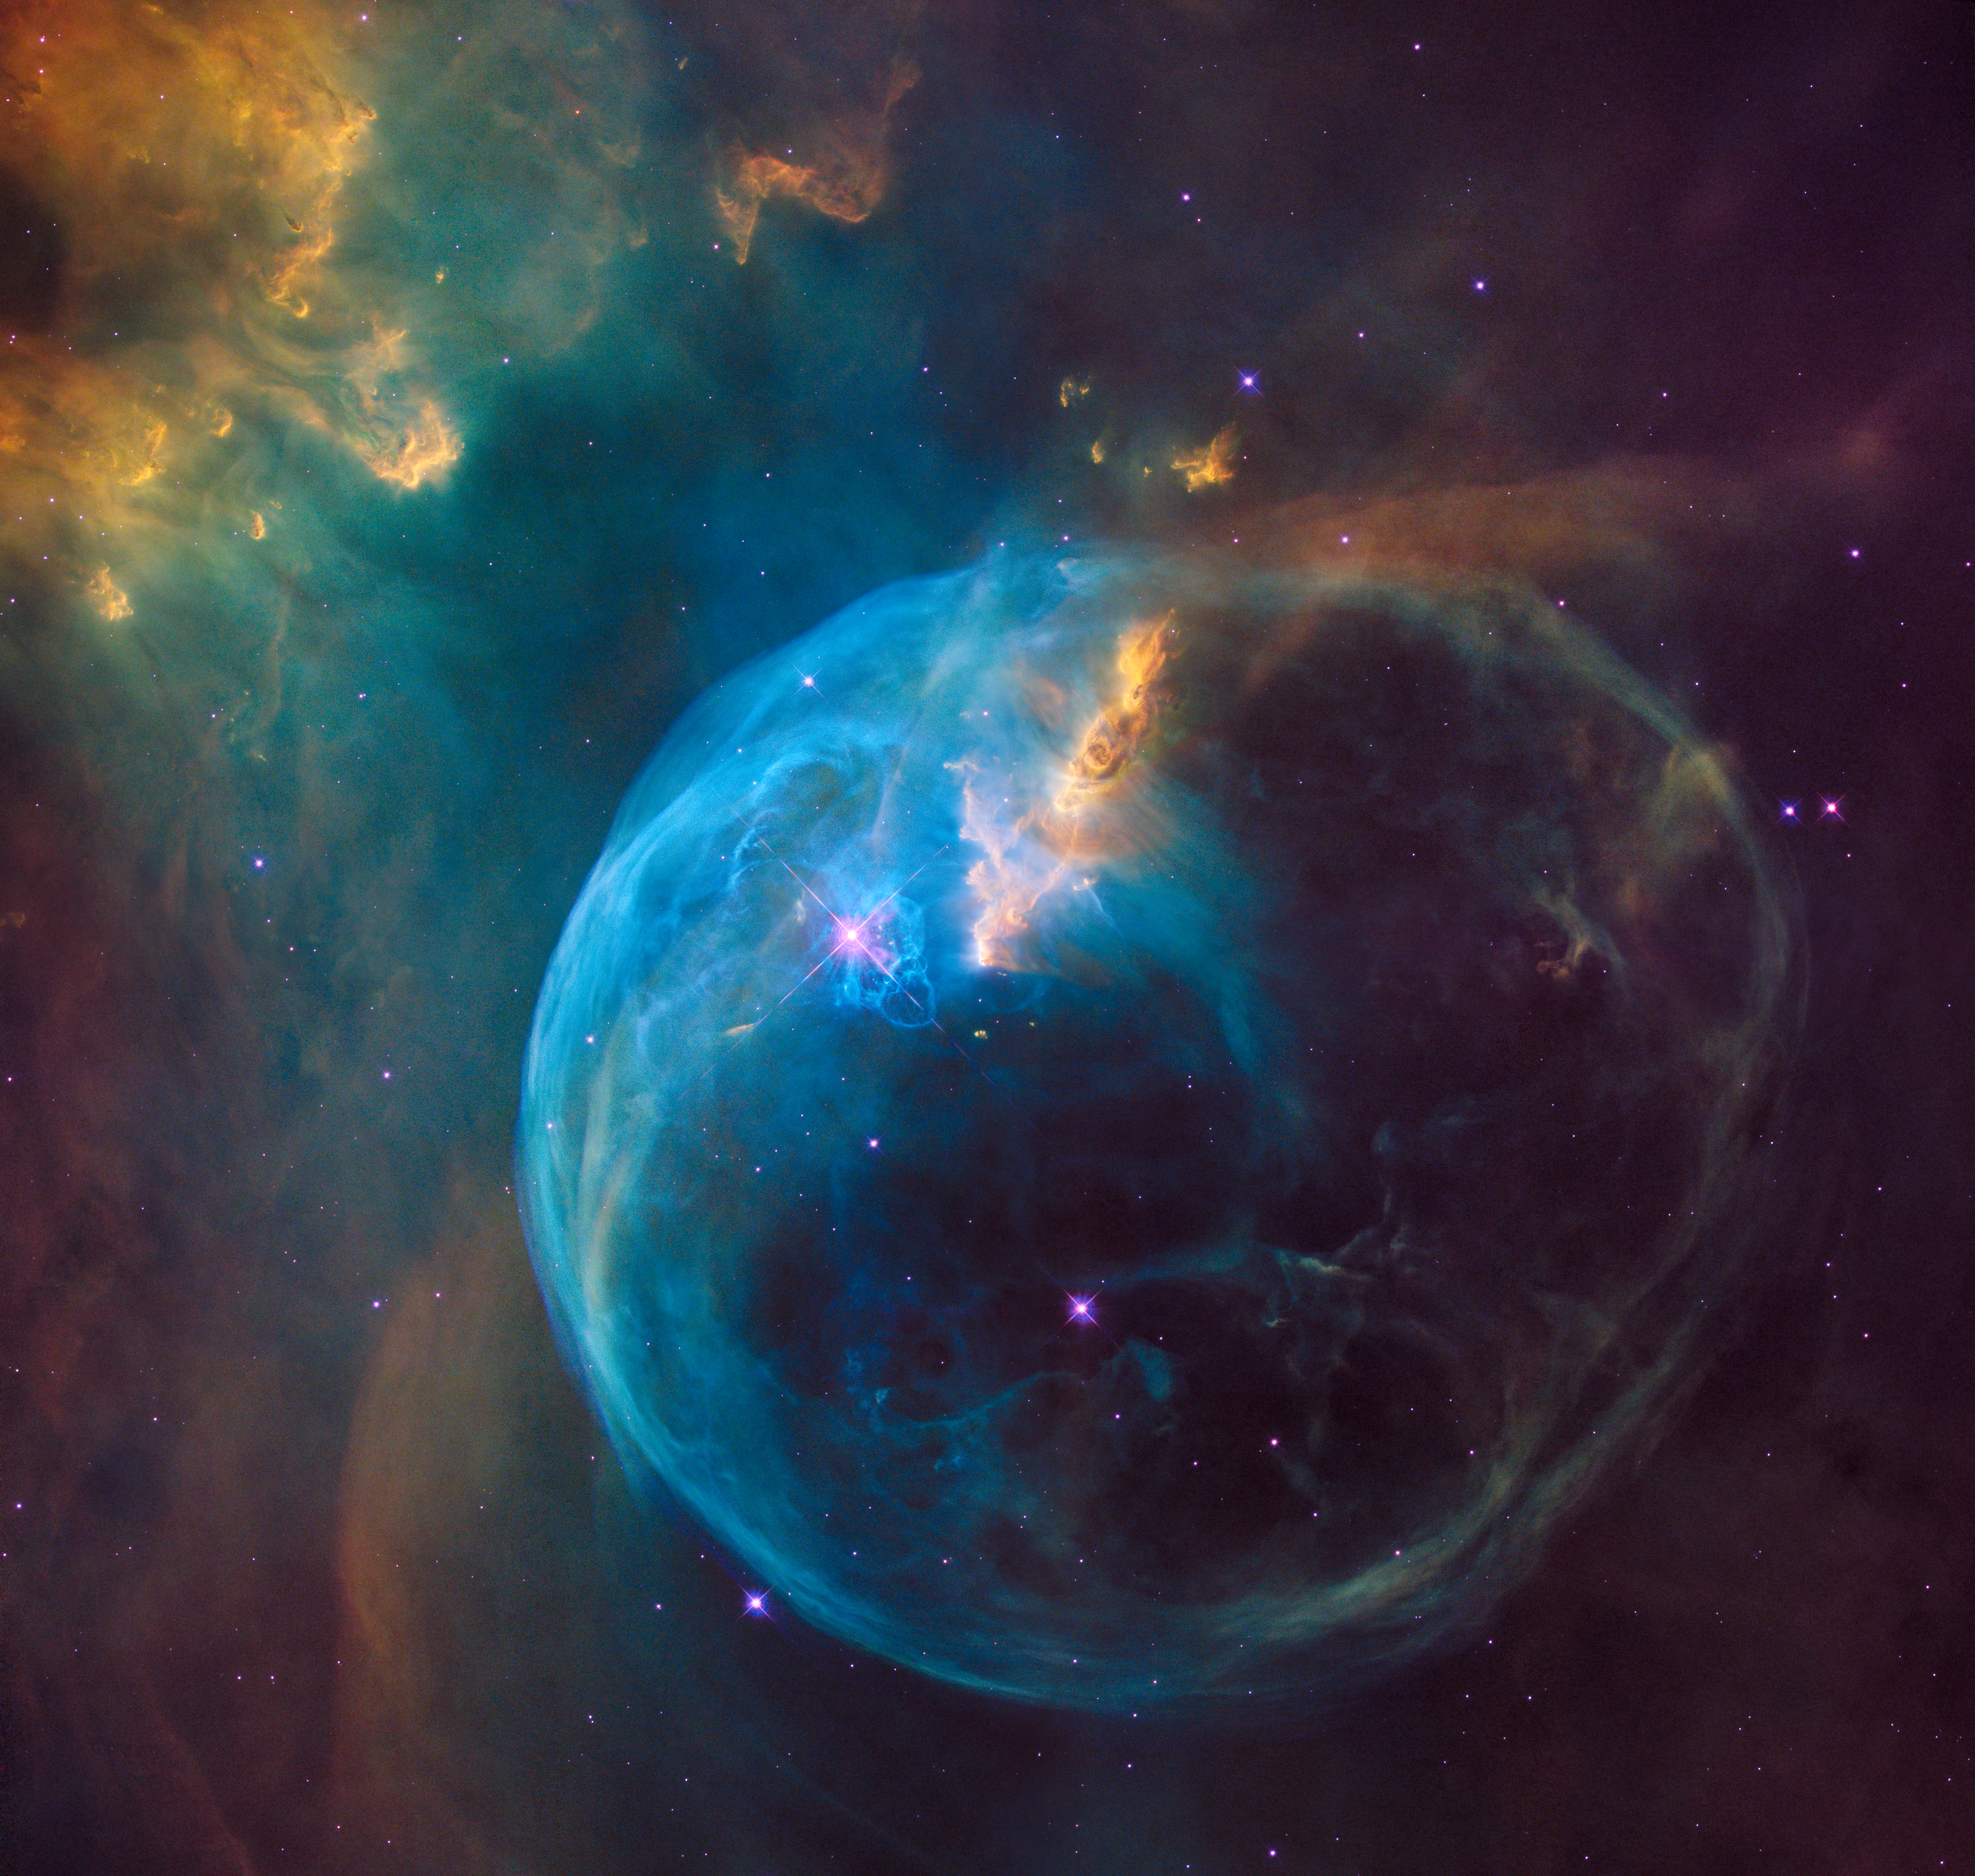

The Bubble Nebula

The Bubble Nebula, also known as NGC 7635, is an emission nebula located 8 000 light-years away. This stunning new image was observed by the NASA/ESA Hubble Space Telescope to celebrate its 26th year in space.

Credit: NASA, ESA, Hubble Heritage Team